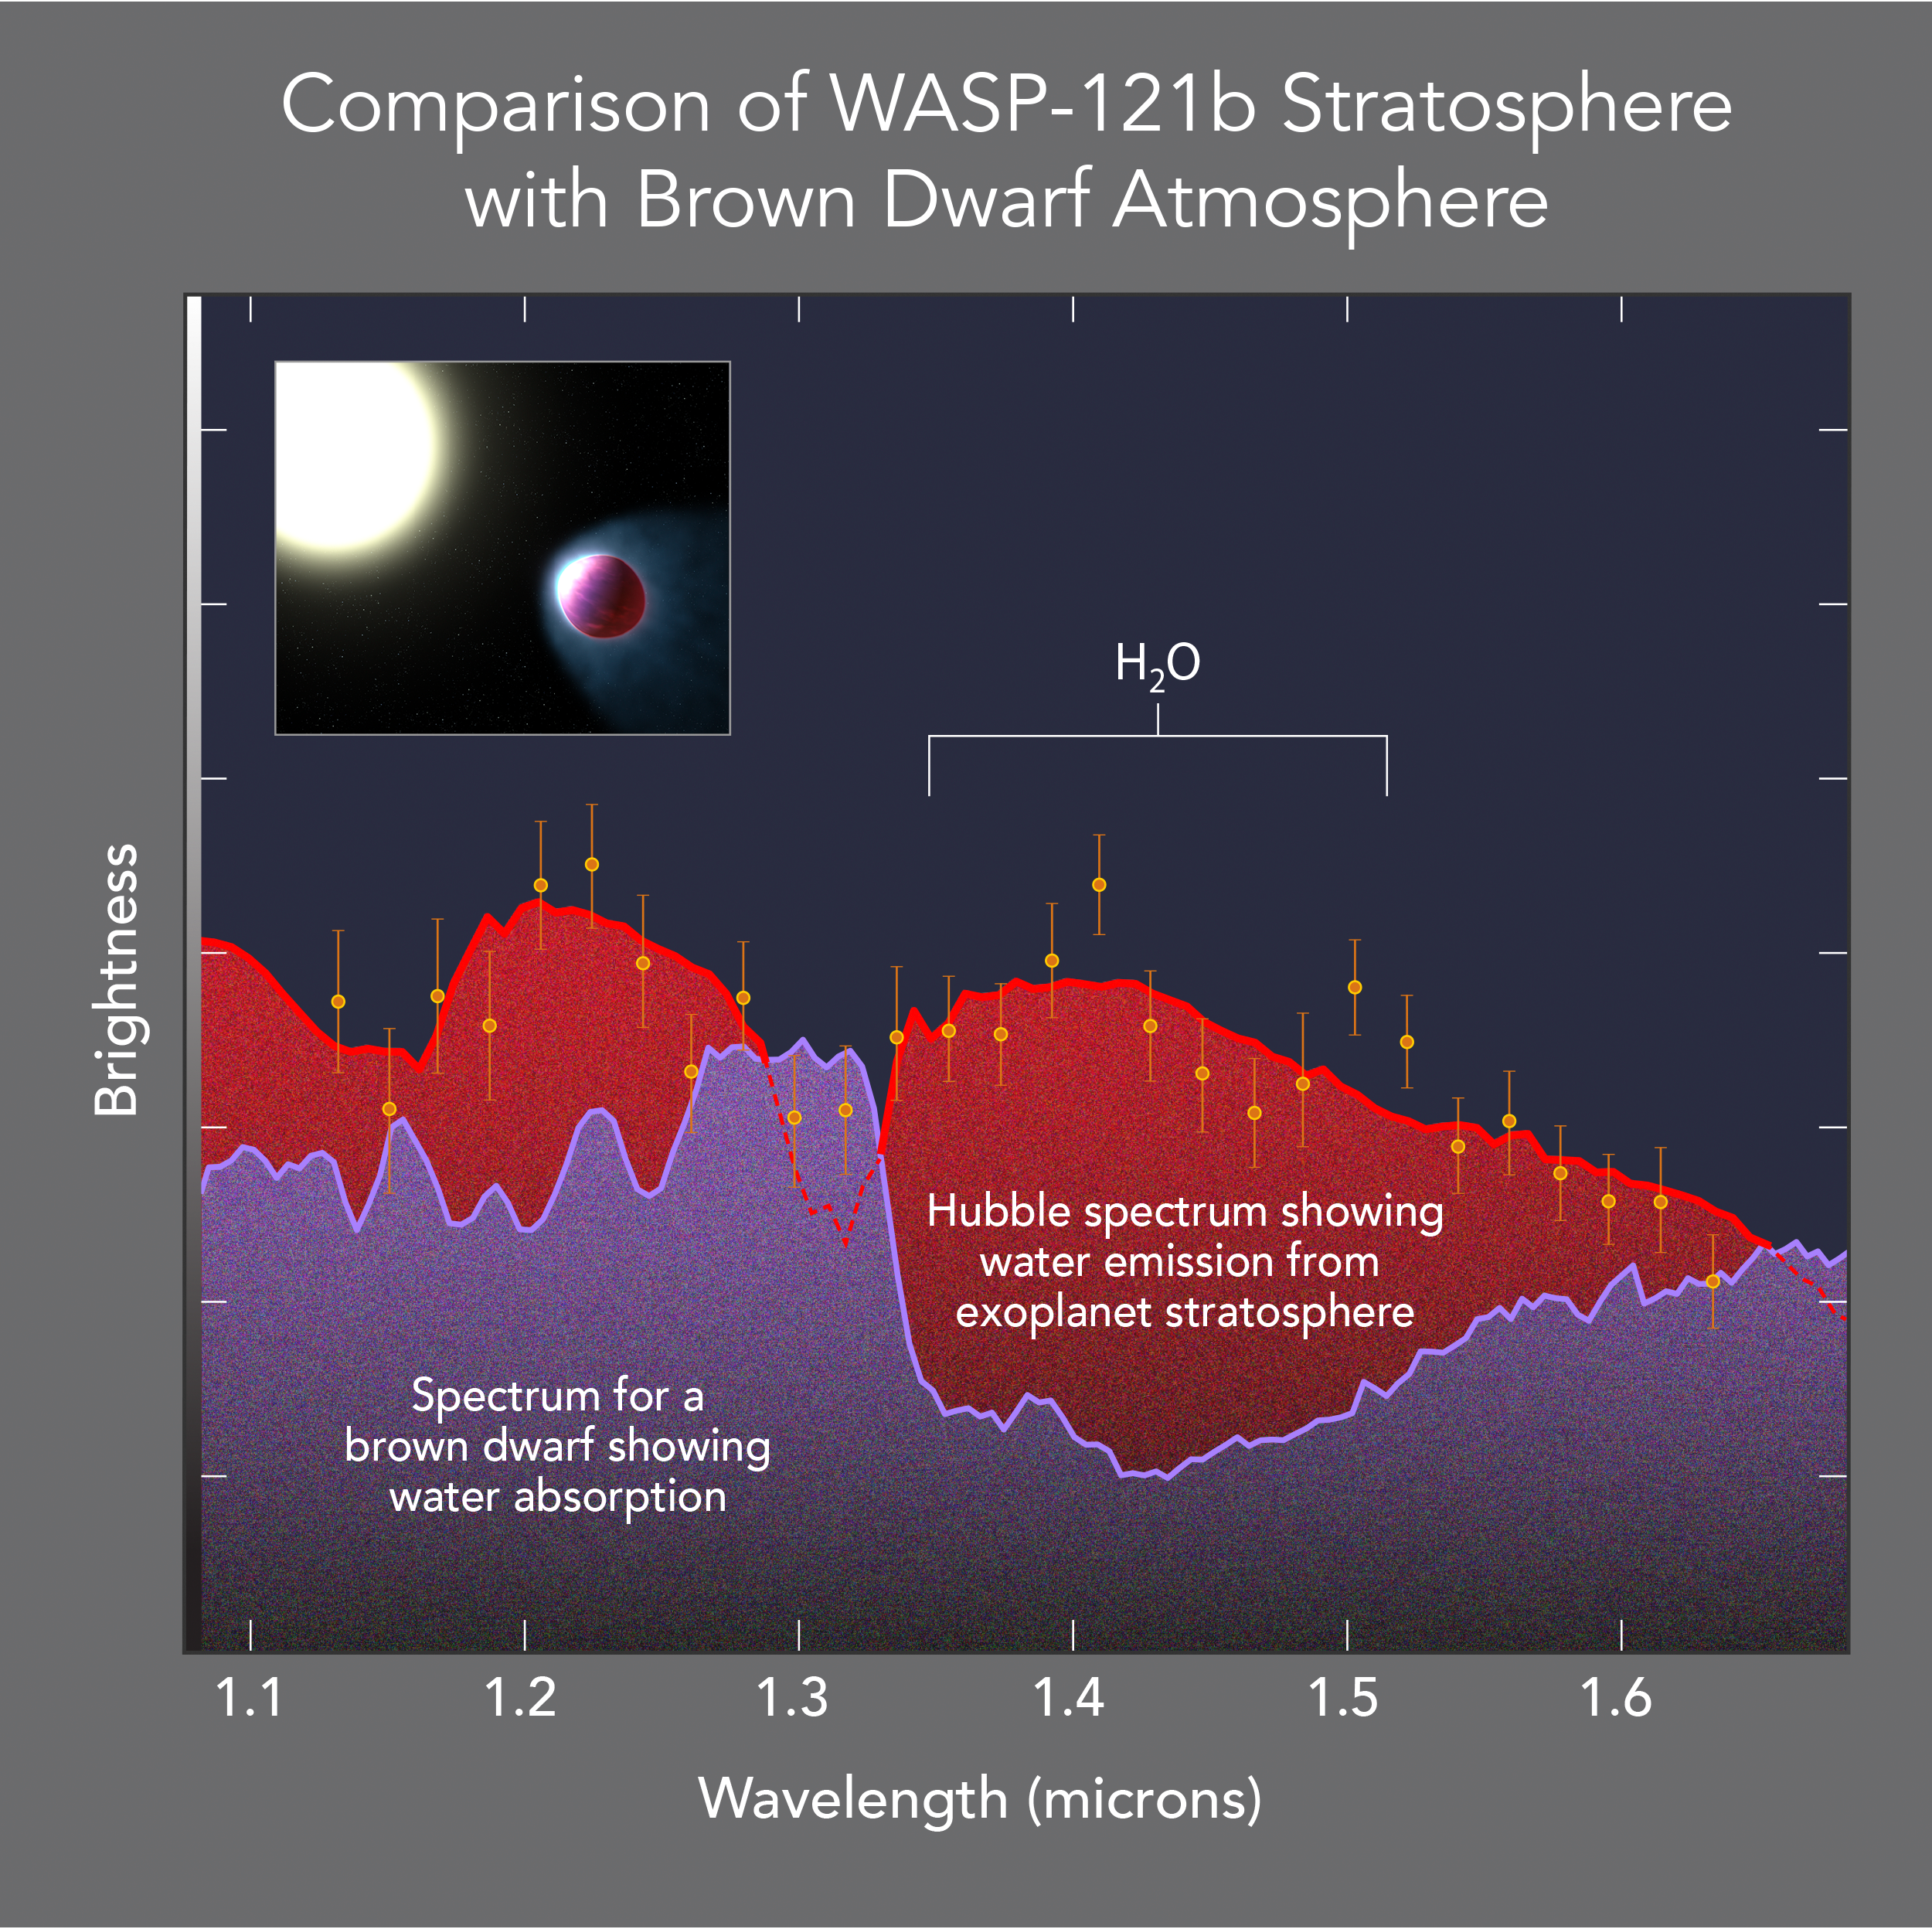

Comparison of WASP-121b stratosphere with brown dwarf atmosphere

This diagram presents evidence for the existence of a stratosphere on a planet orbiting another star. As on Earth, the stratosphere increases in temperature with altitude. The water emissions from the Jupiter-sized planet's upper atmosphere show this. The results are in marked contrast to the spectrum of a failed star, a brown dwarf, which shows water absorption because the atmosphere is cooling with altitude increase.

Credit: NASA, ESA, and A. Feild (STScI)